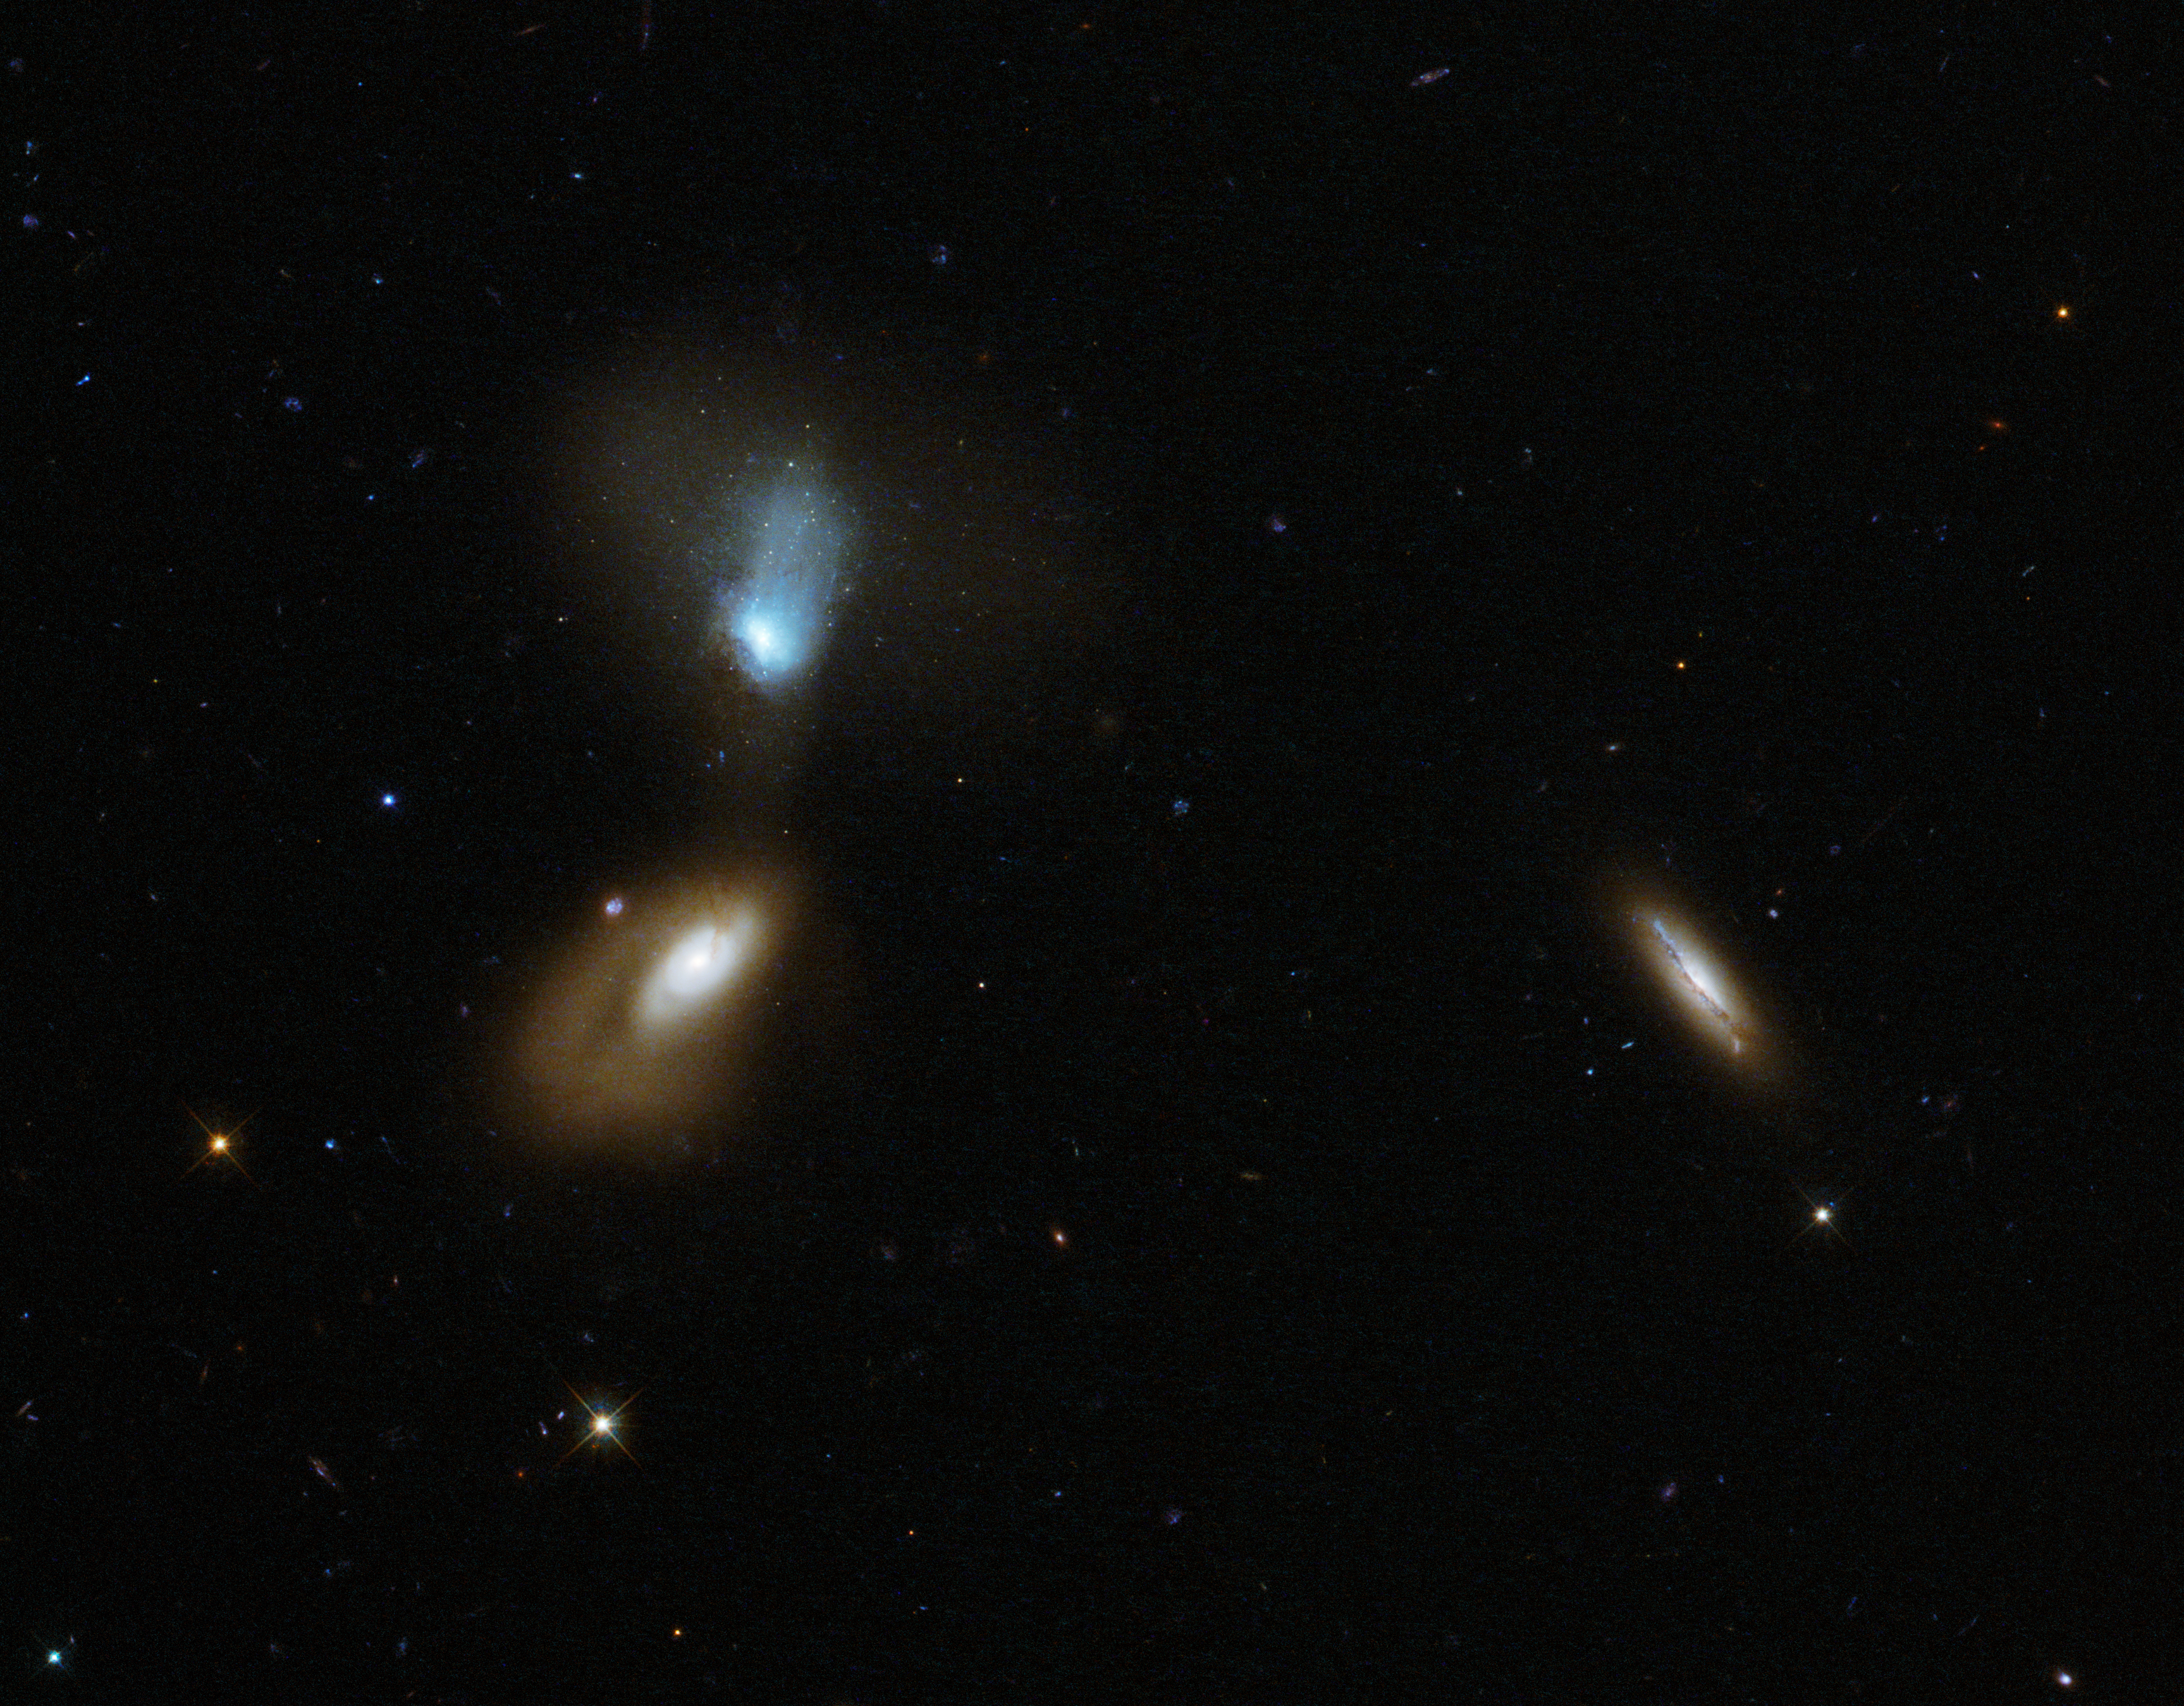

Galactic soup

This new NASA/ESA Hubble Space Telescope image shows a whole host of colourful and differently shaped galaxies; some bright and nearby, some fuzzy, and some so far from us they appear as small specks in the background sky.

The most prominent characters are the two galaxies on the left — 2MASX J16133219+5103436 at the bottom, and its blue-tinted companion SDSS J161330.18+510335 at the top. The latter is slightly closer to us than its partner, but the two are still near enough to one another to interact. Together, the two make up a galactic pair named Zw I 136.

Both galaxies in this pair have disturbed shapes and extended soft halos. They don’t seem to conform to our view of a “typical” galaxy — unlike the third bright object in this frame, a side-on spiral seen towards the right of the image.

Astronomers classify galaxies according to their appearance and their shape. The most famous classification scheme is known as the Hubble sequence, devised by its namesake Edwin Hubble. One of the great questions in galaxy evolution is how interactions between galaxies trigger waves of star formation, and why these stars then abruptly stop forming. Interacting pairs like this one present astronomers with perfect opportunities to investigate this.

A version of this image was entered into the Hubble's Hidden Treasures image processing competition by contestant Judy Schmidt.

Credit: ESA/Hubble & NASA Acknowledgement: Judy Schmidt